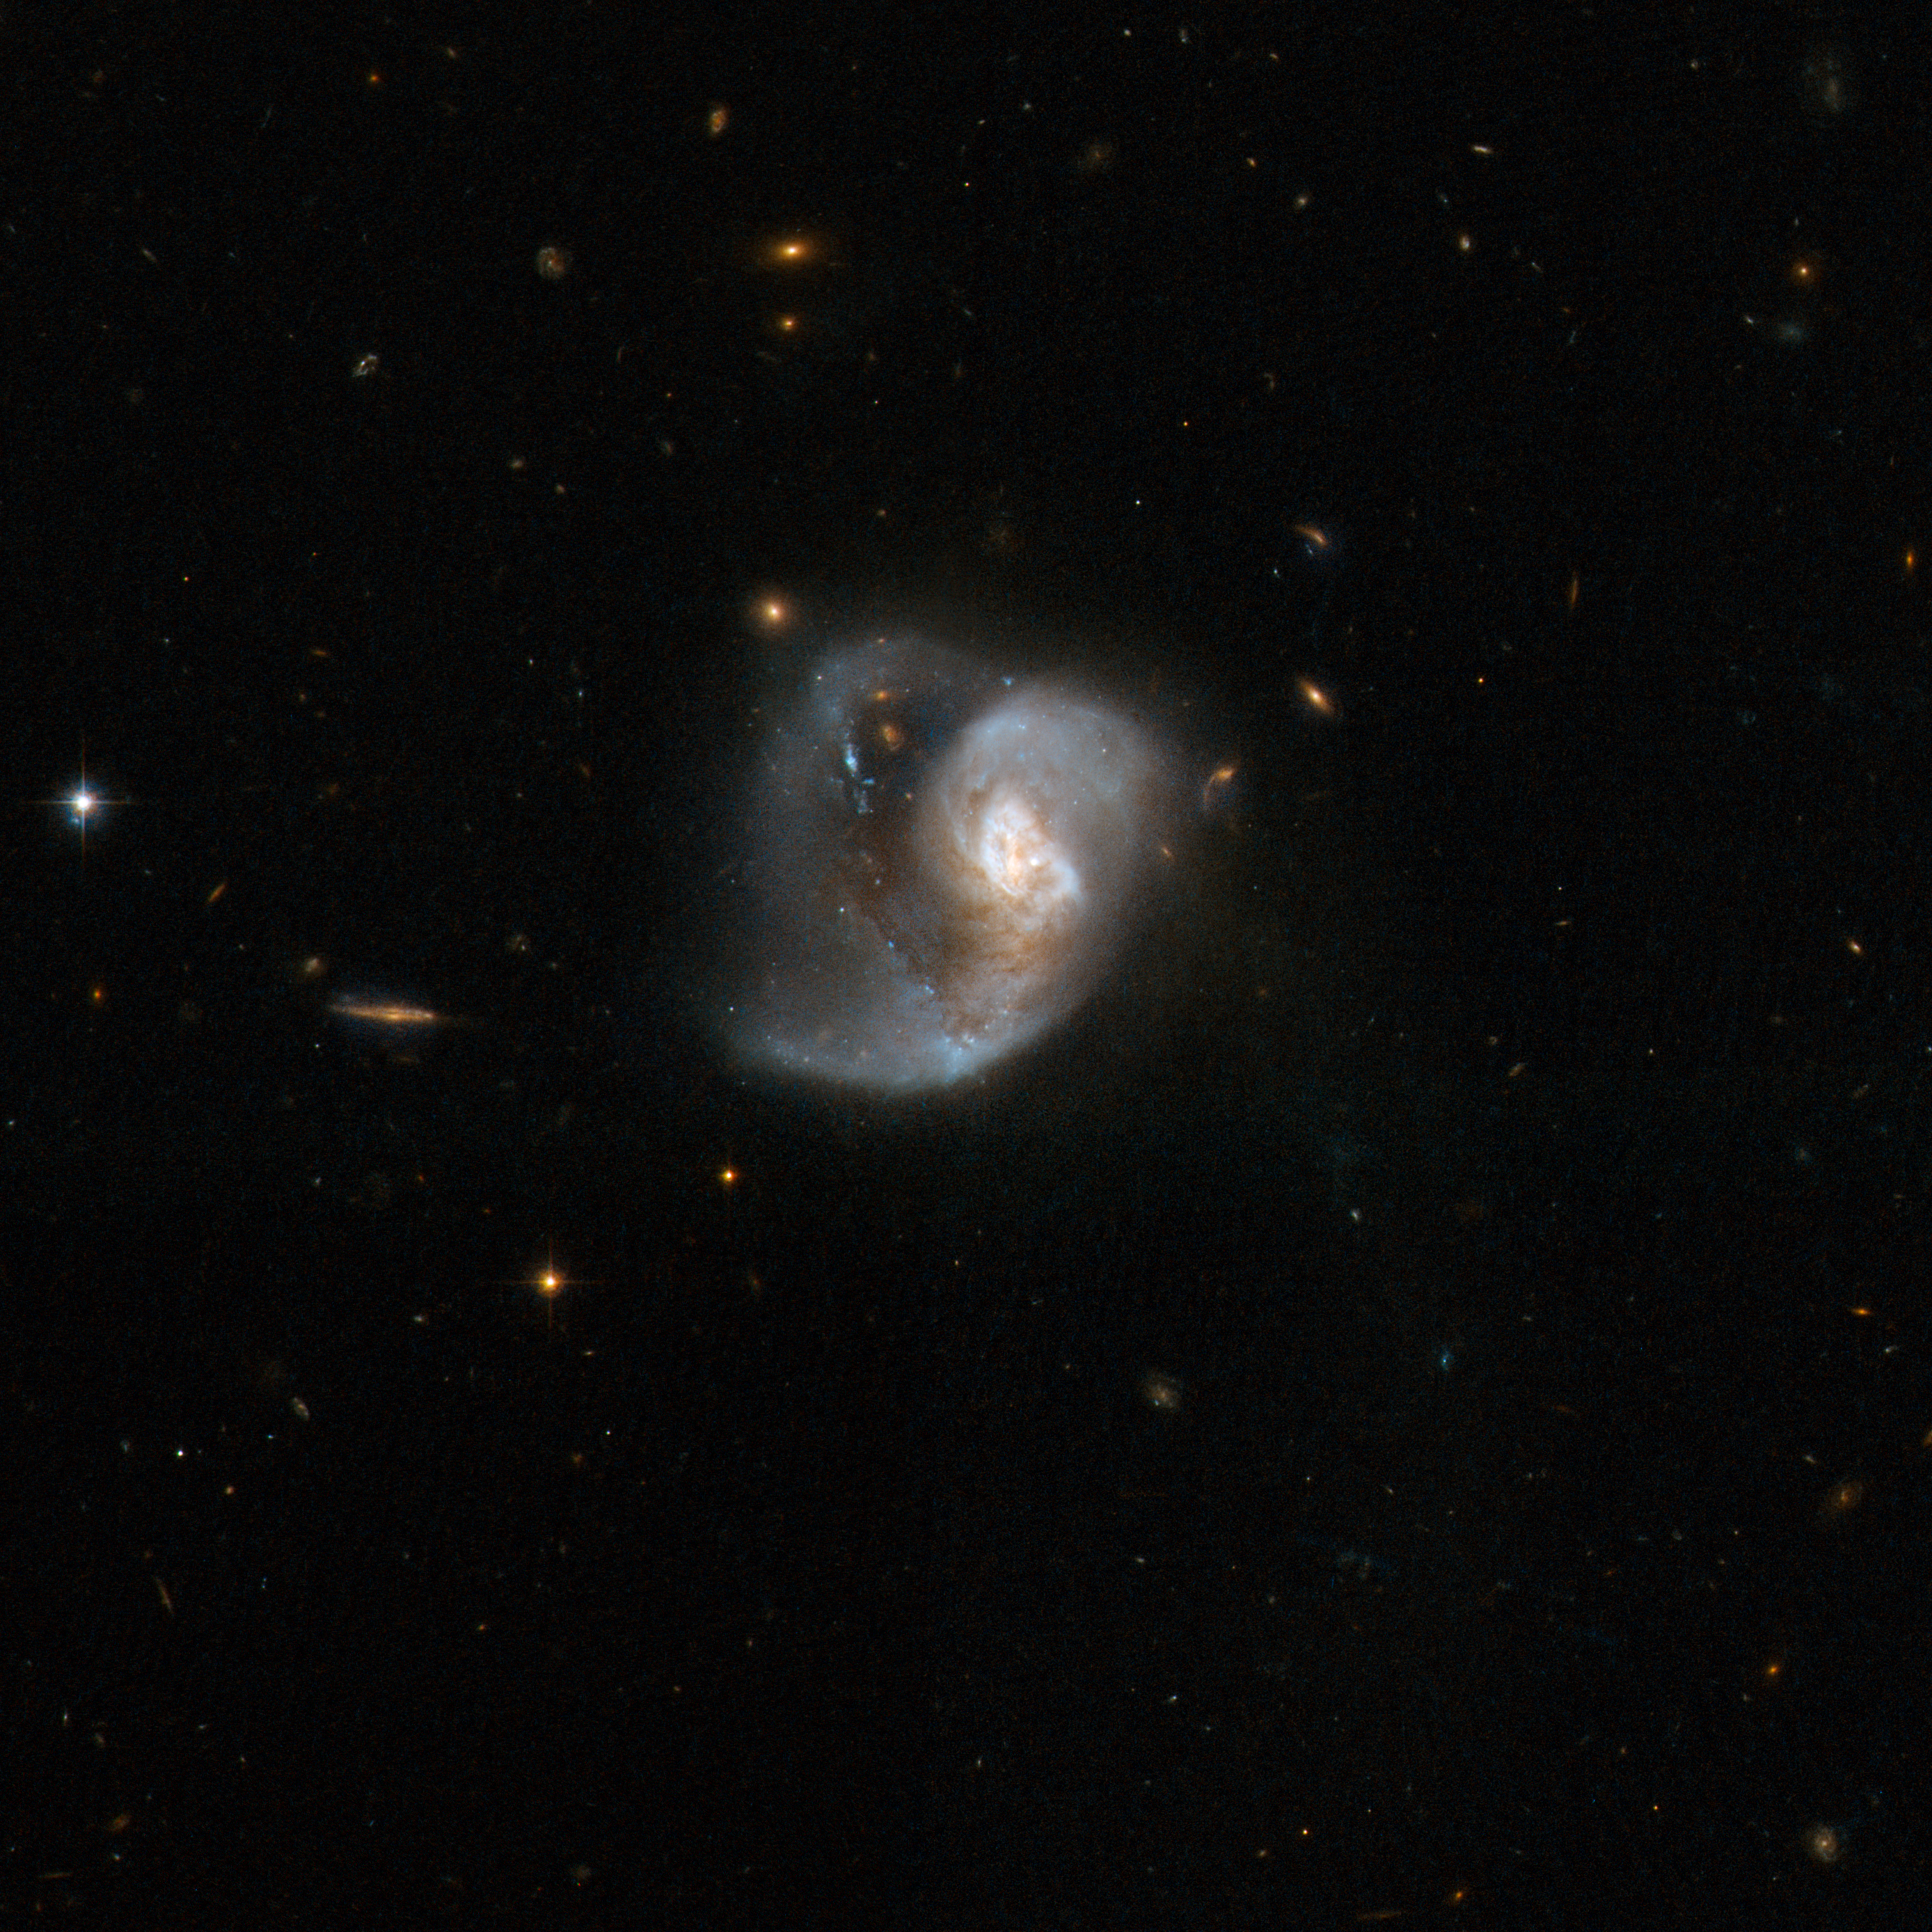

VV 283

VV 283 looks like a single peculiar galaxy, but is in fact a pair of merging galaxies. A tidal tail swirls out from a messy central region and splits into two branches. The upward twisting branch is brightened by luminous blue star knots. Like many merging systems, VV 283 is a very luminous infrared system, radiating nearly one thousand billion times energy more than our Sun. VV 283 is located in the constellation of Virgo, the Maiden, some 500 million light-years away.

This image is part of a large collection of 59 images of merging galaxies taken by the Hubble Space Telescope and released on the occasion of its 18th anniversary on 24th April 2008.

Credit: NASA, ESA, the Hubble Heritage Team (STScI/AURA)-ESA/Hubble Collaboration and A. Evans (University of Virginia, Charlottesville/NRAO/Stony Brook University)